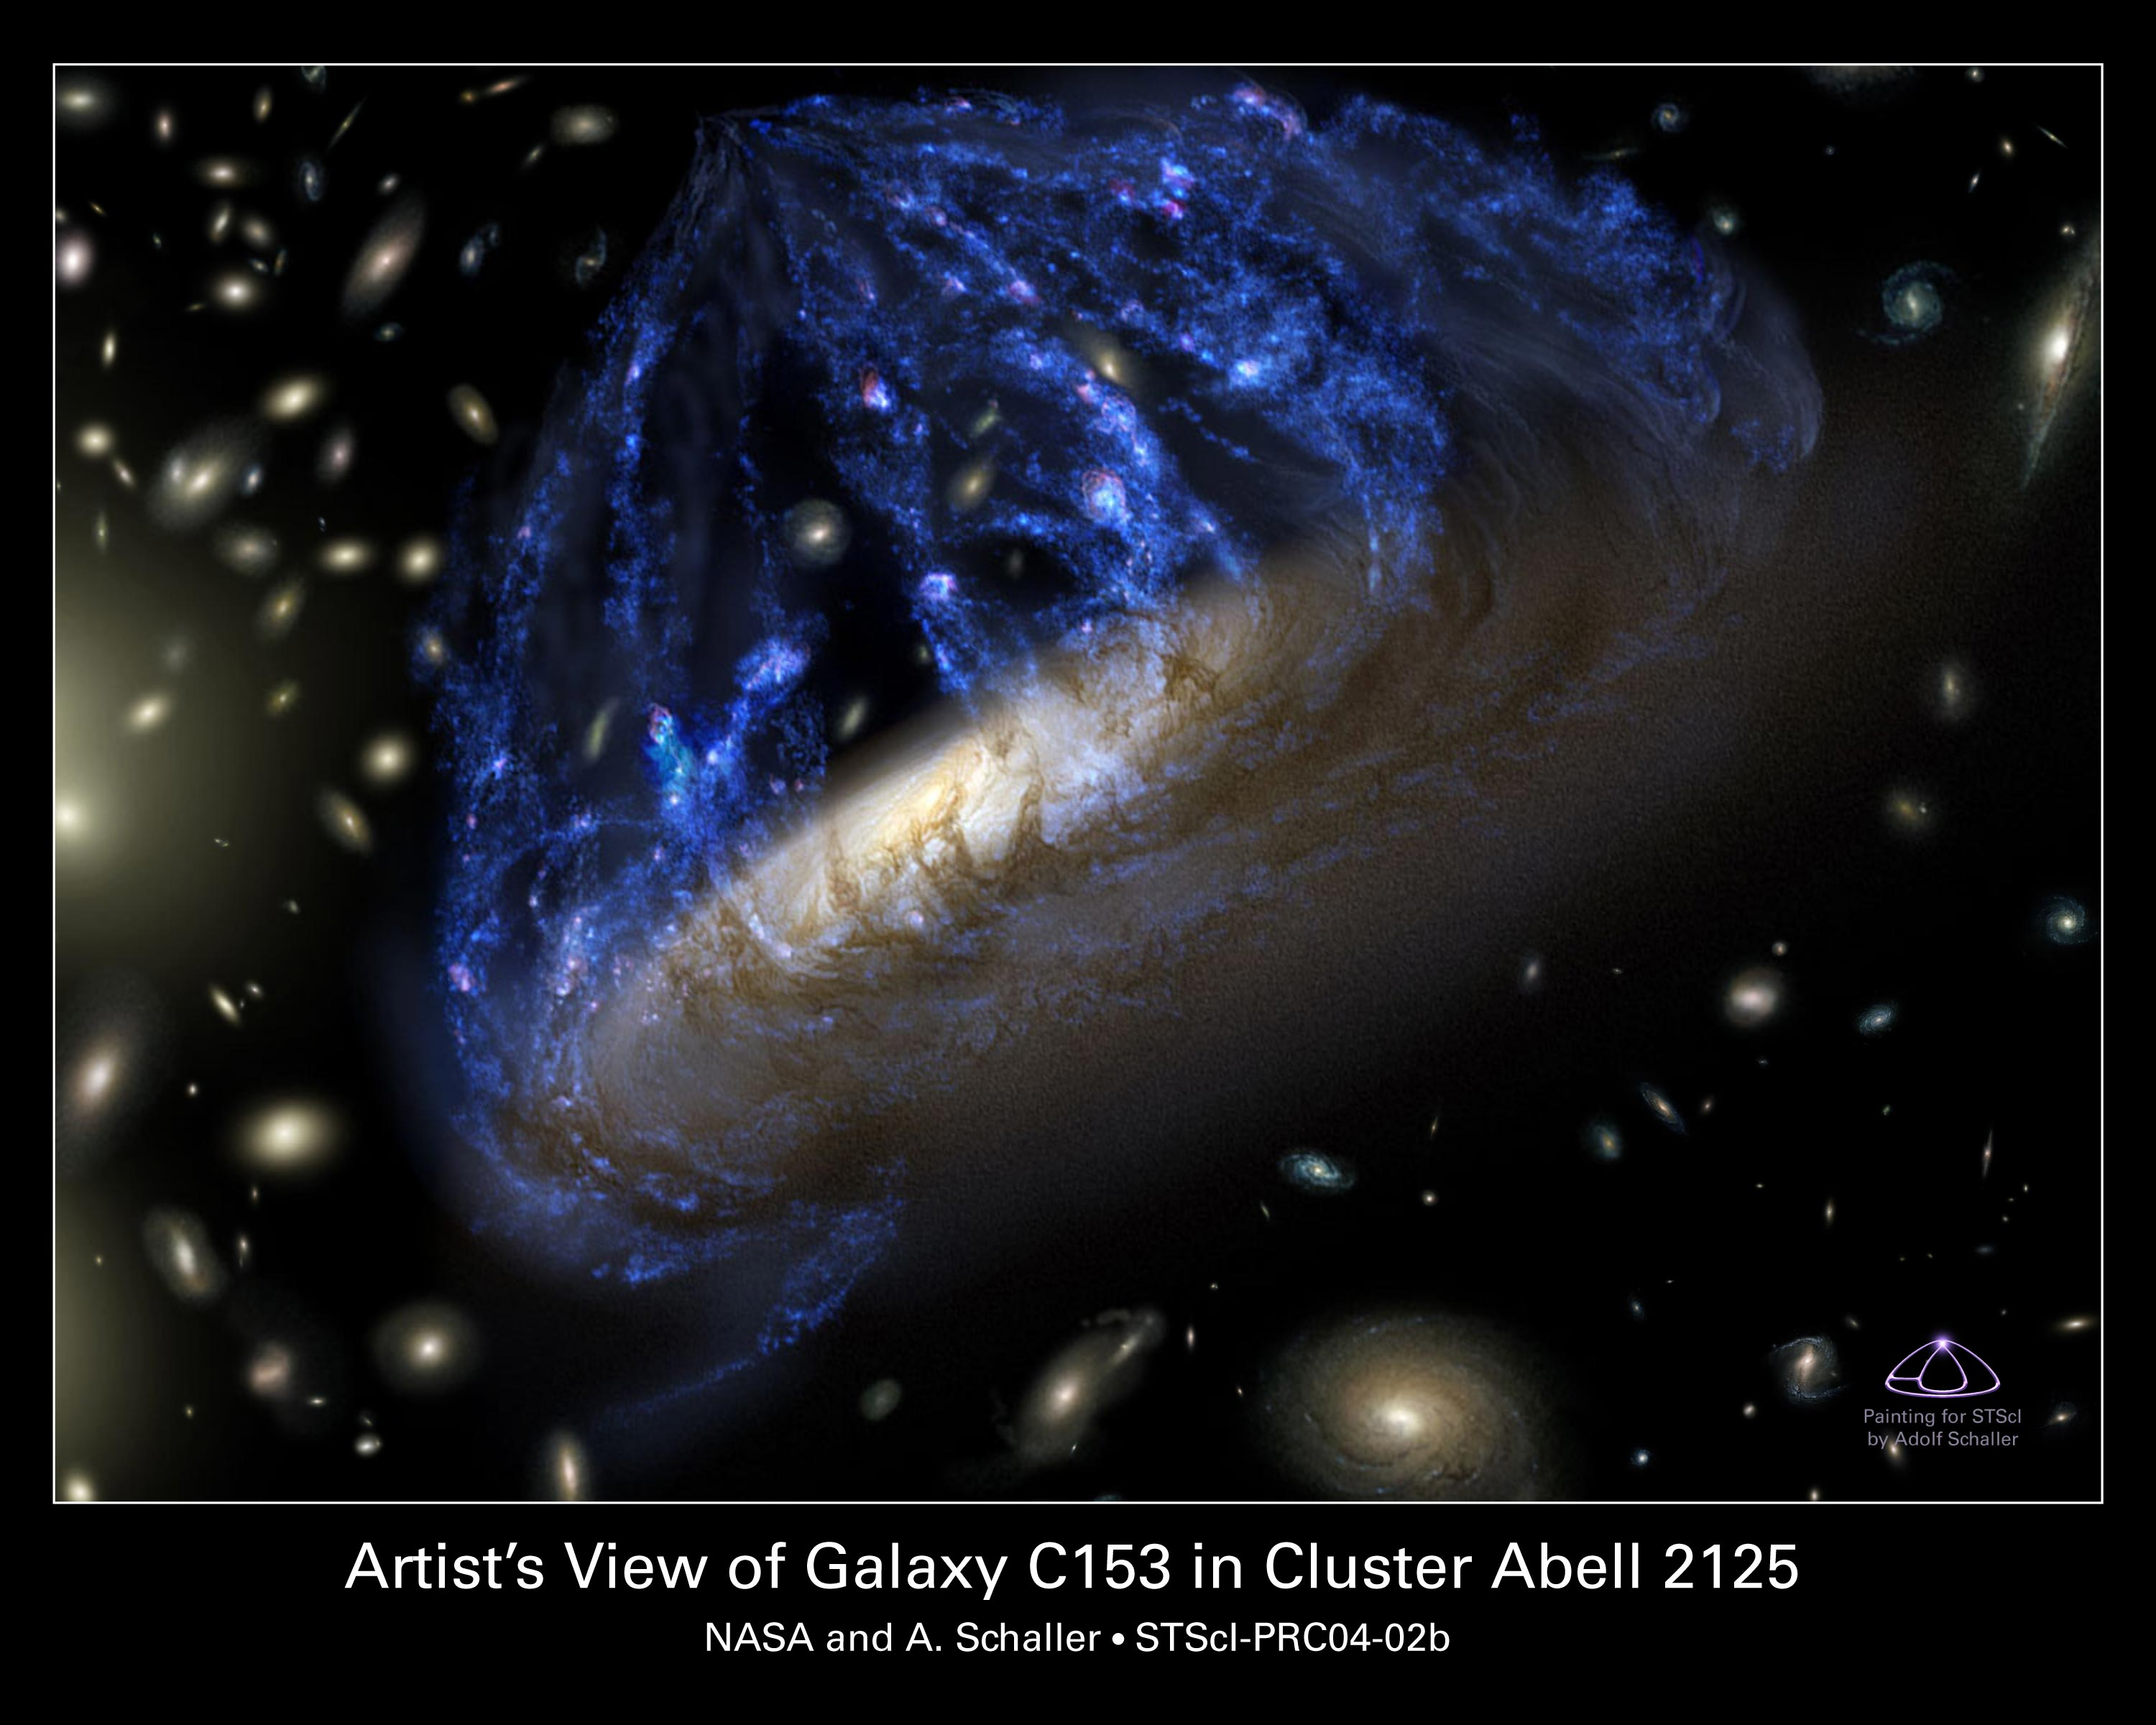

A Disintegrating Galaxy Plows Through Space (artist's impression)

This is an artist's conception of the spiral galaxy C153. The galaxy looks peculiar because it is plowing through the heart of a distant galaxy cluster at 4.5 million miles per hour (about 7.2 million kilometres per hour). Gas compressed along the galaxy's leading edge, like snow before a plow, ignited a firestorm of new star birth. The ram pressure of external hot gas trapped in the cluster is stripping away the galaxy's own cooler gas, leaving behind its skeletal spiral arms of dust and stars. The galaxy trails a 200,000-light-year-long streamer of gas bleeding off the disk. In this painting the streamers appear foreshortened in this head-on view of the approaching galaxy. This painting is based on observations from optical, radio and X-ray telescopes. Parallel observations at different wavelengths trace how stars, gas, and dust are being tossed around and torn from the fragile galaxy.

Credit: NASA/ESA and A. Schaller